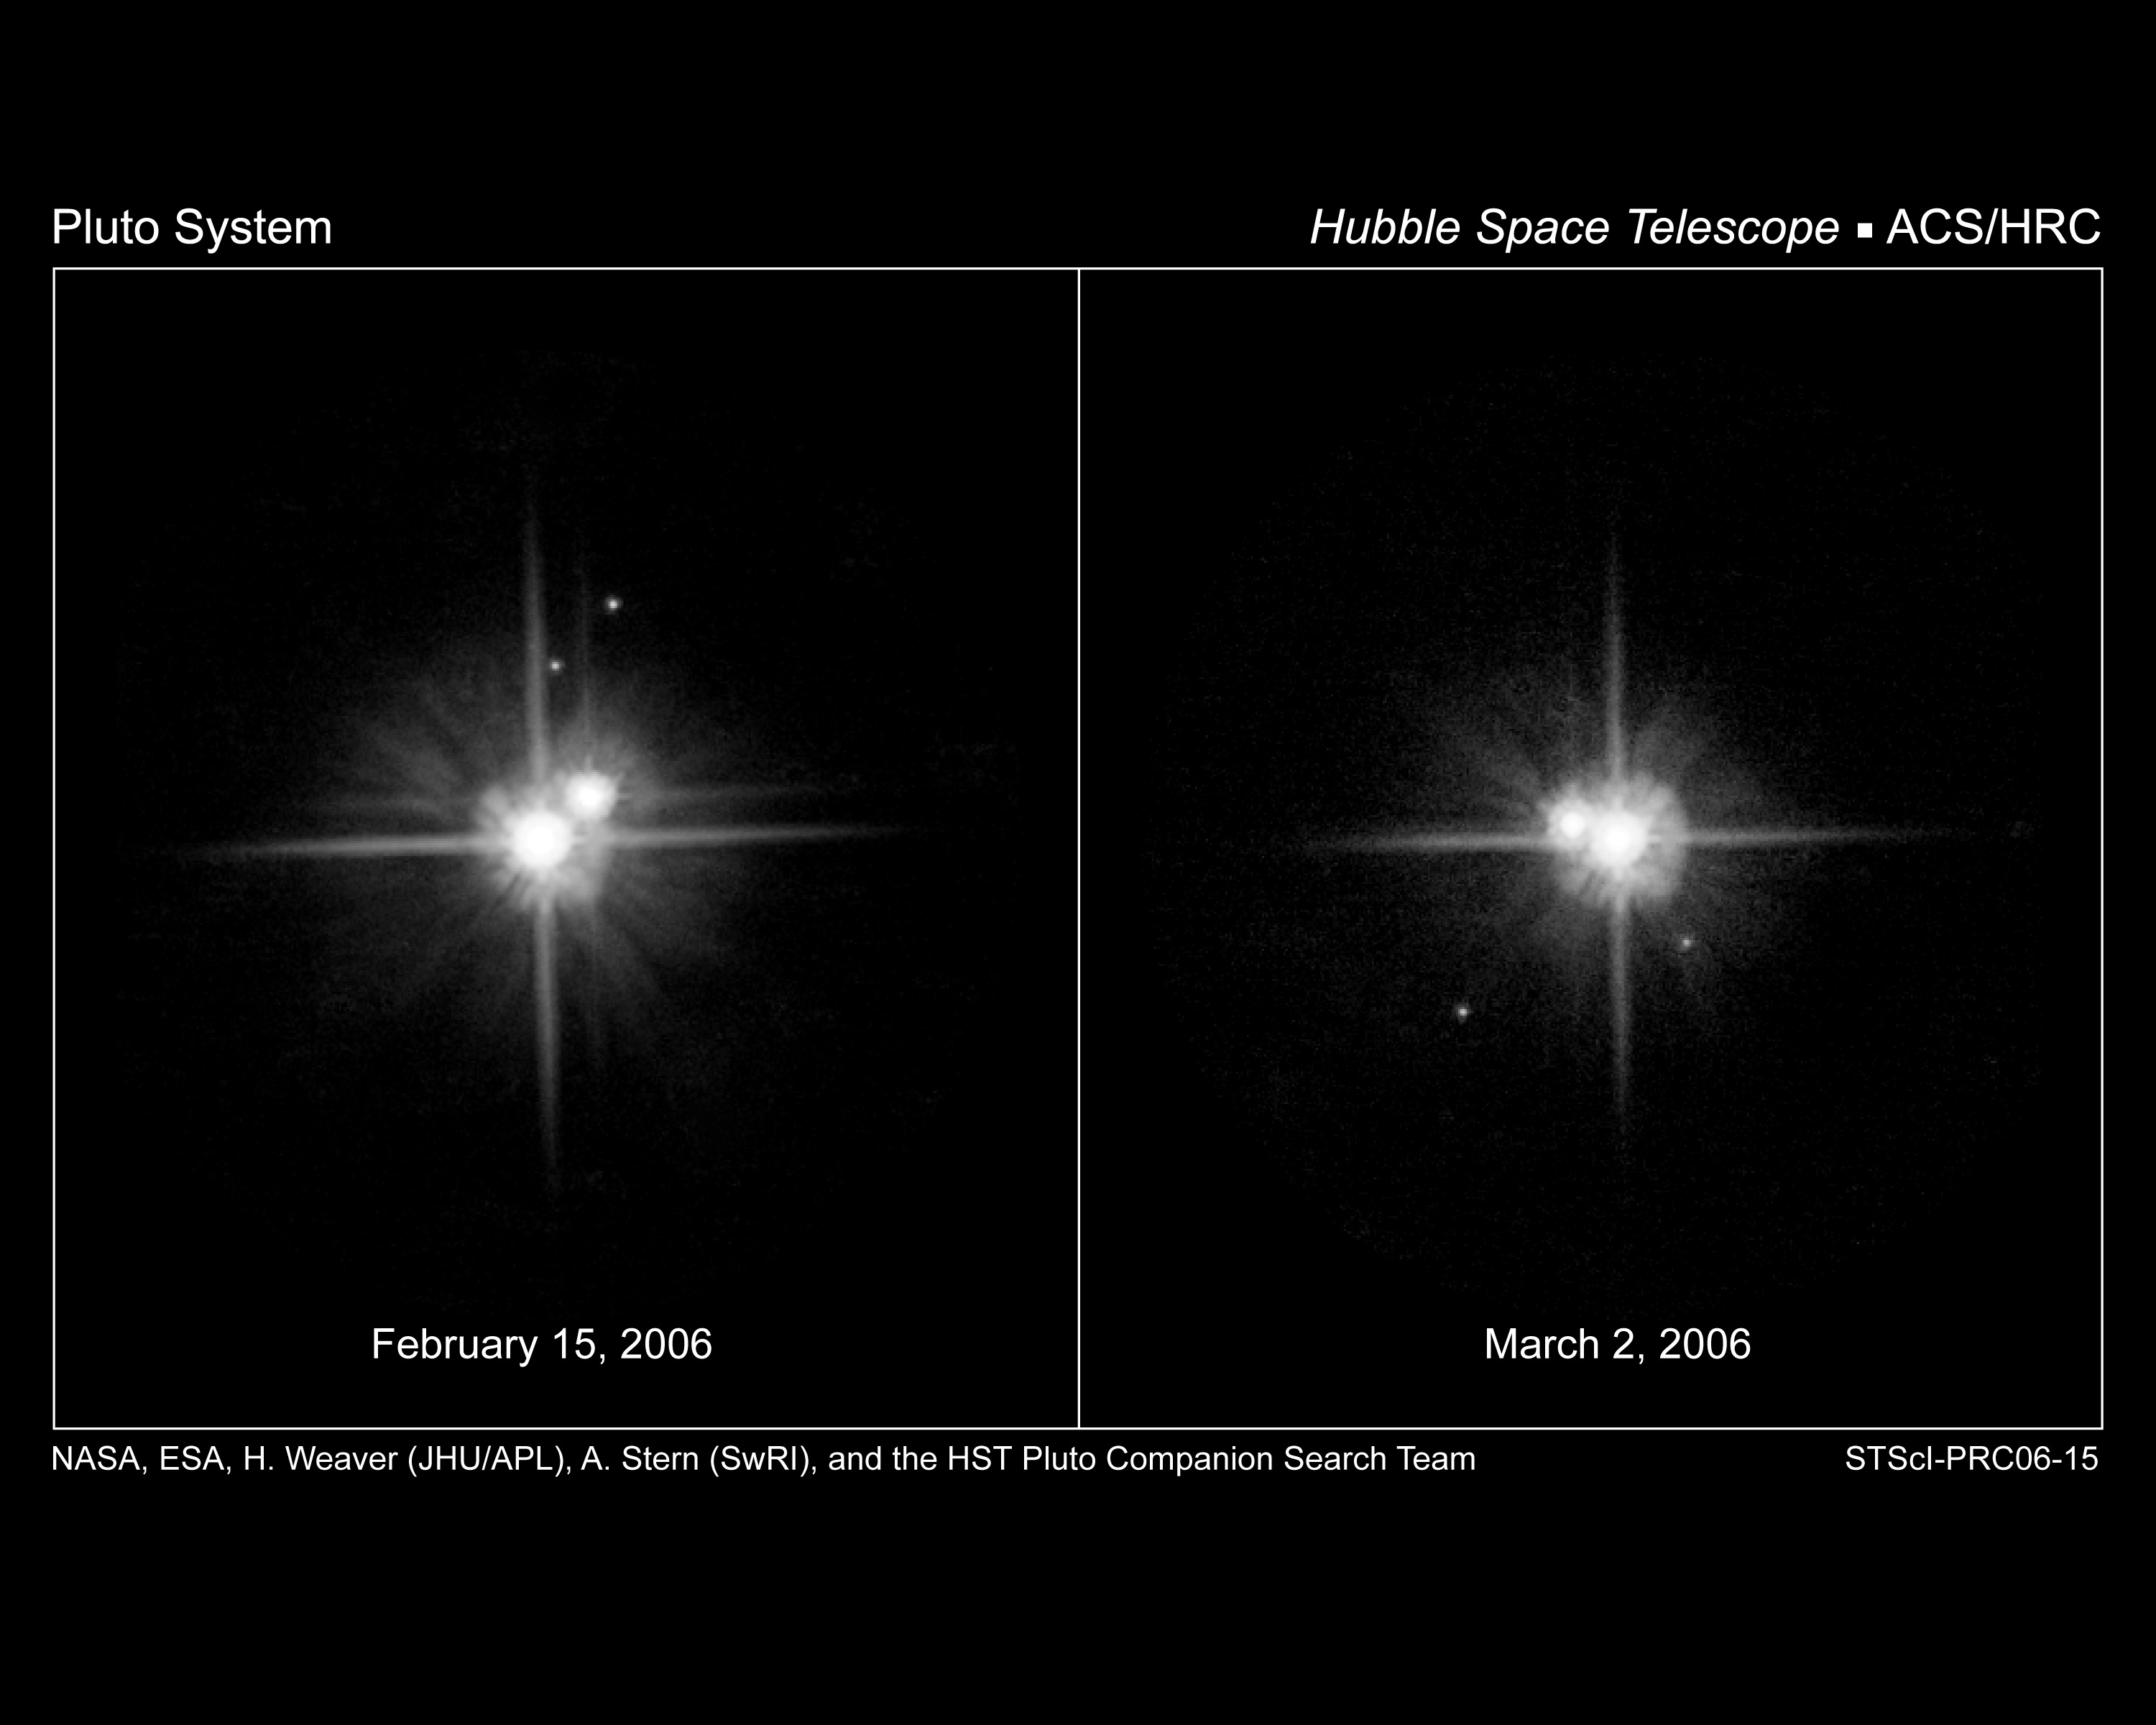

Hubble's latest look at Pluto's moons supports a common birth

This pair of NASA/ESA Hubble Space Telescope images shows the motion of Pluto's satellites between February 15th and March 2nd, 2006. Both images were taken through a red filter (F606W) using the High Resolution Channel (HRC) of the Advanced Camera for Surveys (ACS). During this 15-day period, Pluto's newly-discovered satellite S/2005 P 2 (P2 for short) moved counterclockwise from the noon position to the 5 o'clock position, while the other newly-discovered satellite S/2005 P 1 (P1 for short) moved counterclockwise from the 1 o'clock position to the 7 o'clock position. During that same period, Pluto's much larger and closer moon, Charon, started near the 2 o'clock position, made more than two complete counterclockwise revolutions around Pluto, and ended up near the 10 o'clock position. The motions of P1 and P2 are in excellent agreement with the predicted motions based on earlier Hubble observations, thereby confirming that P1 and P2 are orbiting Pluto in the same plane as Charon's orbit, as expected if all three moons were created during a single, giant impact event.

Credit: NASA, ESA, H. Weaver (Johns Hopkins University/Applied Physics Lab), A. Stern (Southwest Research Institute), and the HST Pluto Companion Search Team